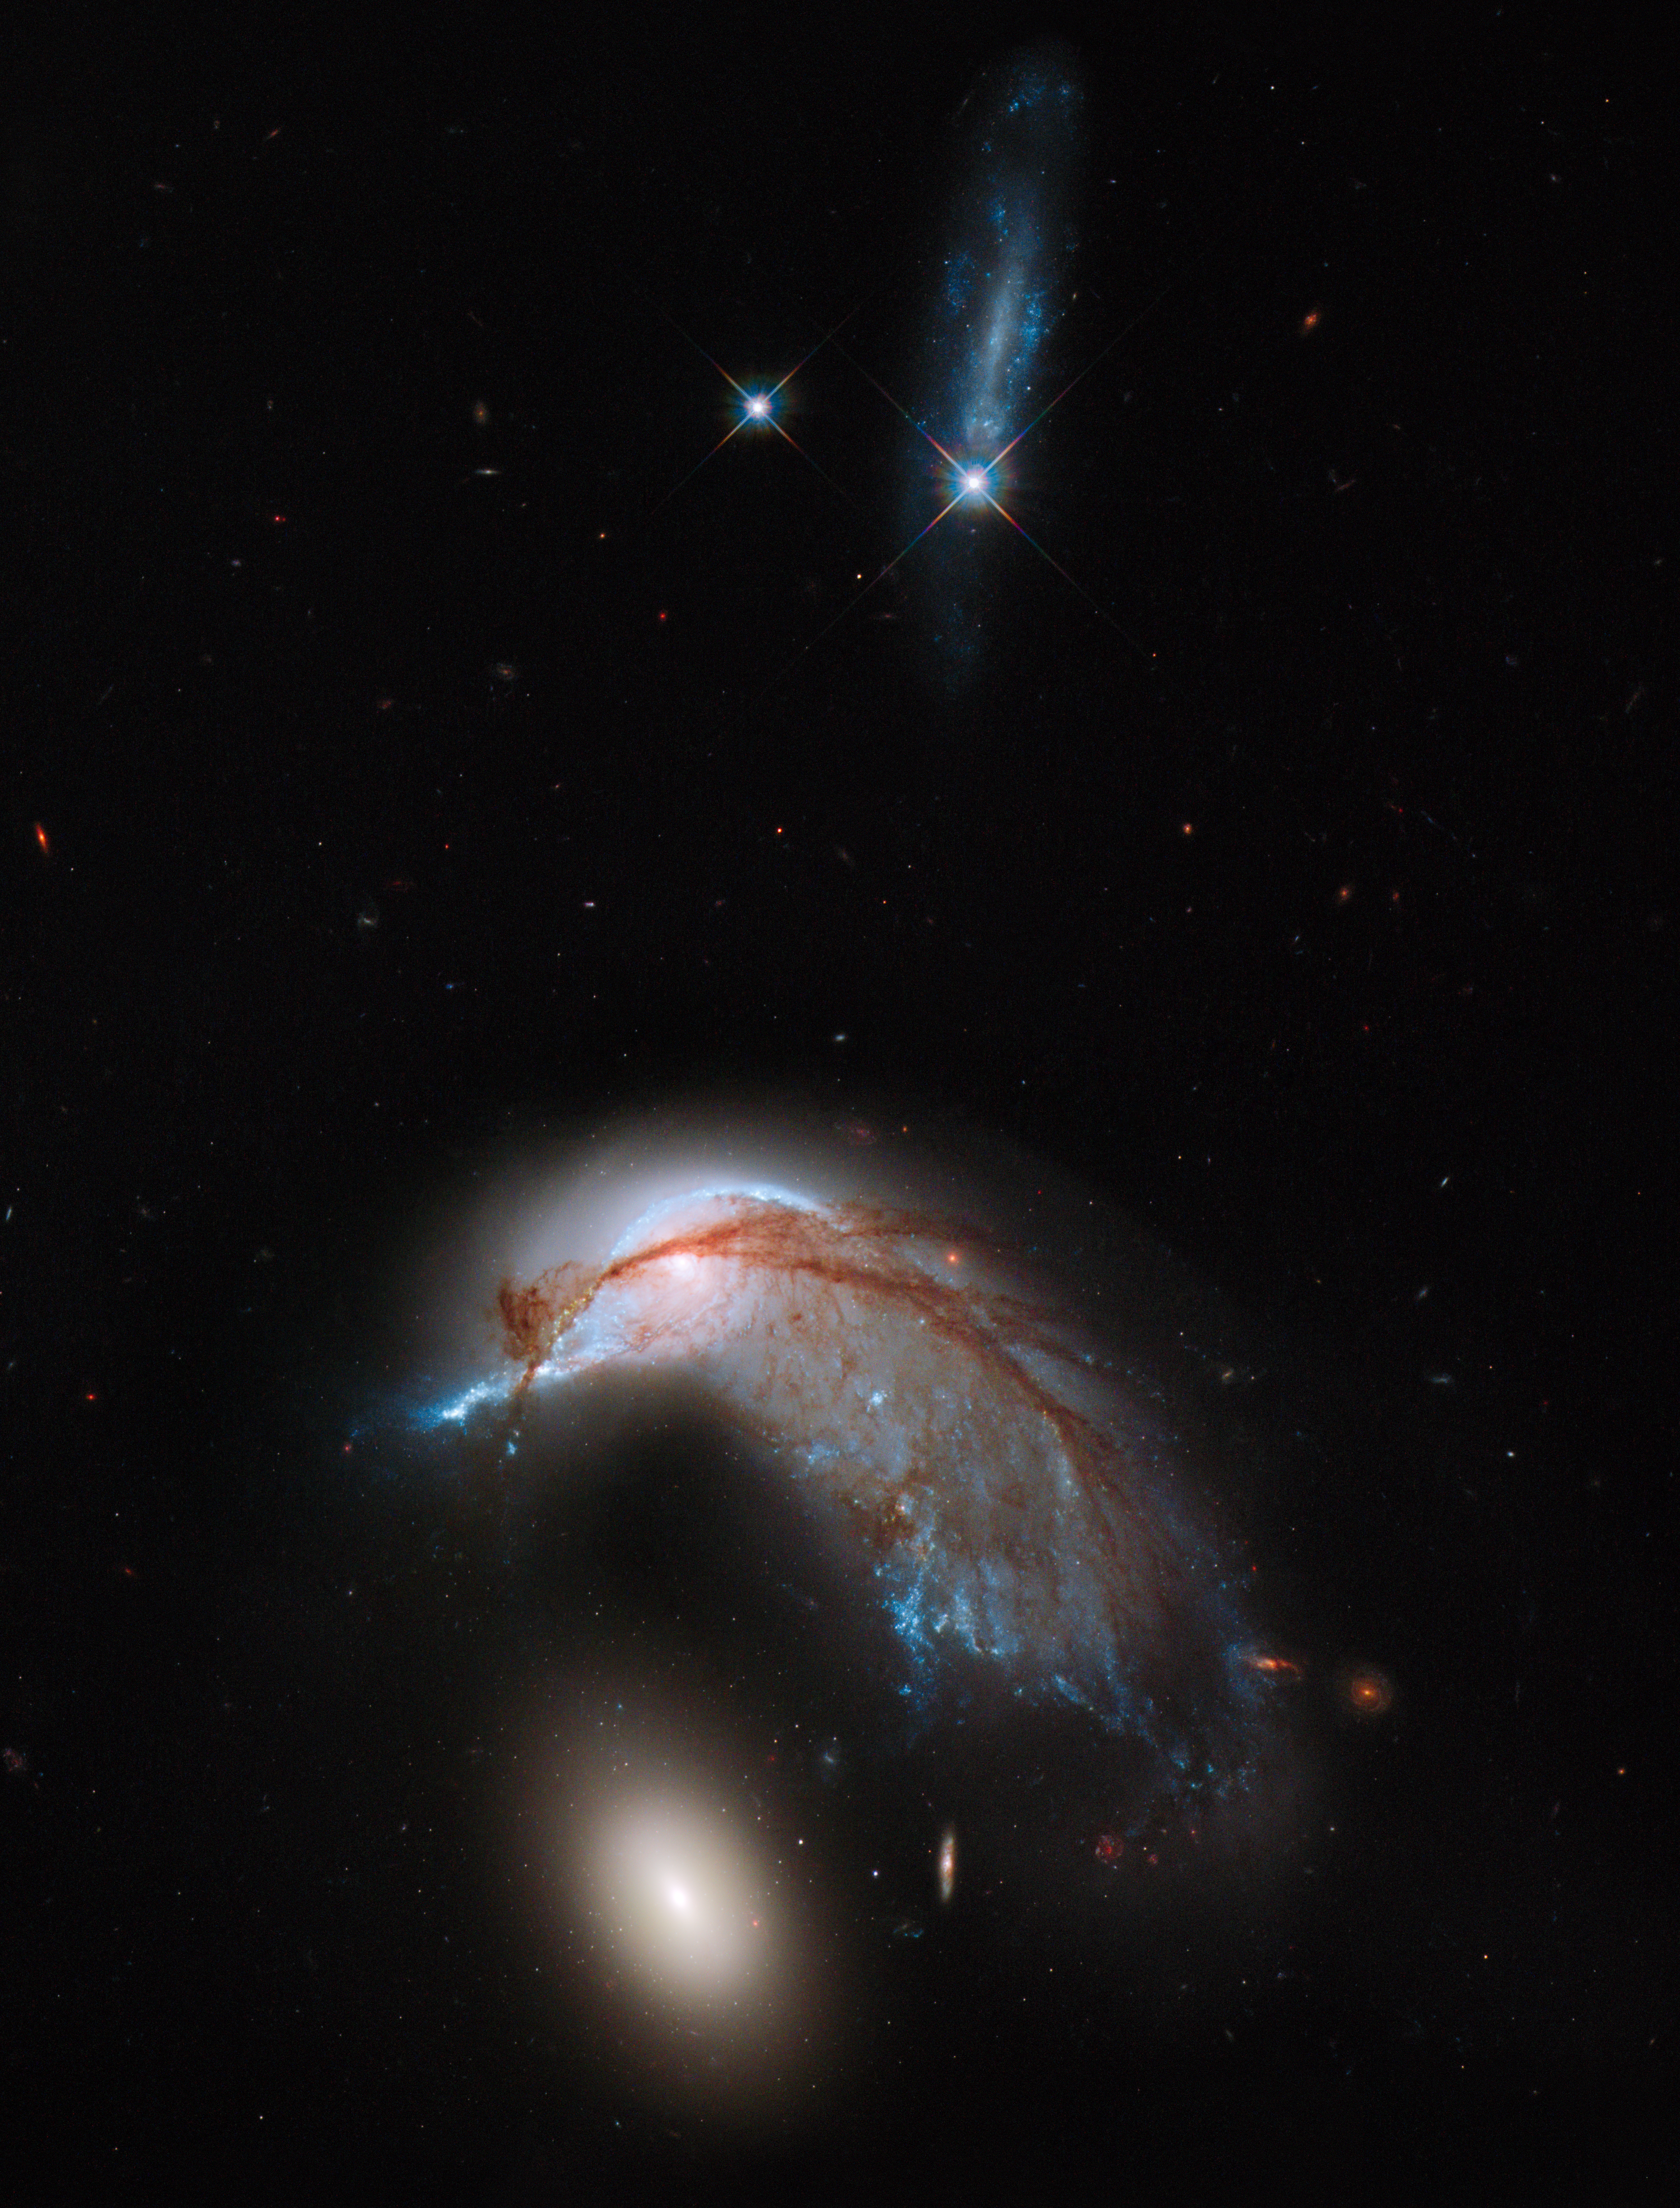

Screenshot of Hubblecast 67

Hubblecast 67 can be downloaded in a range of formats including HD here

Credit: NASA & ESA